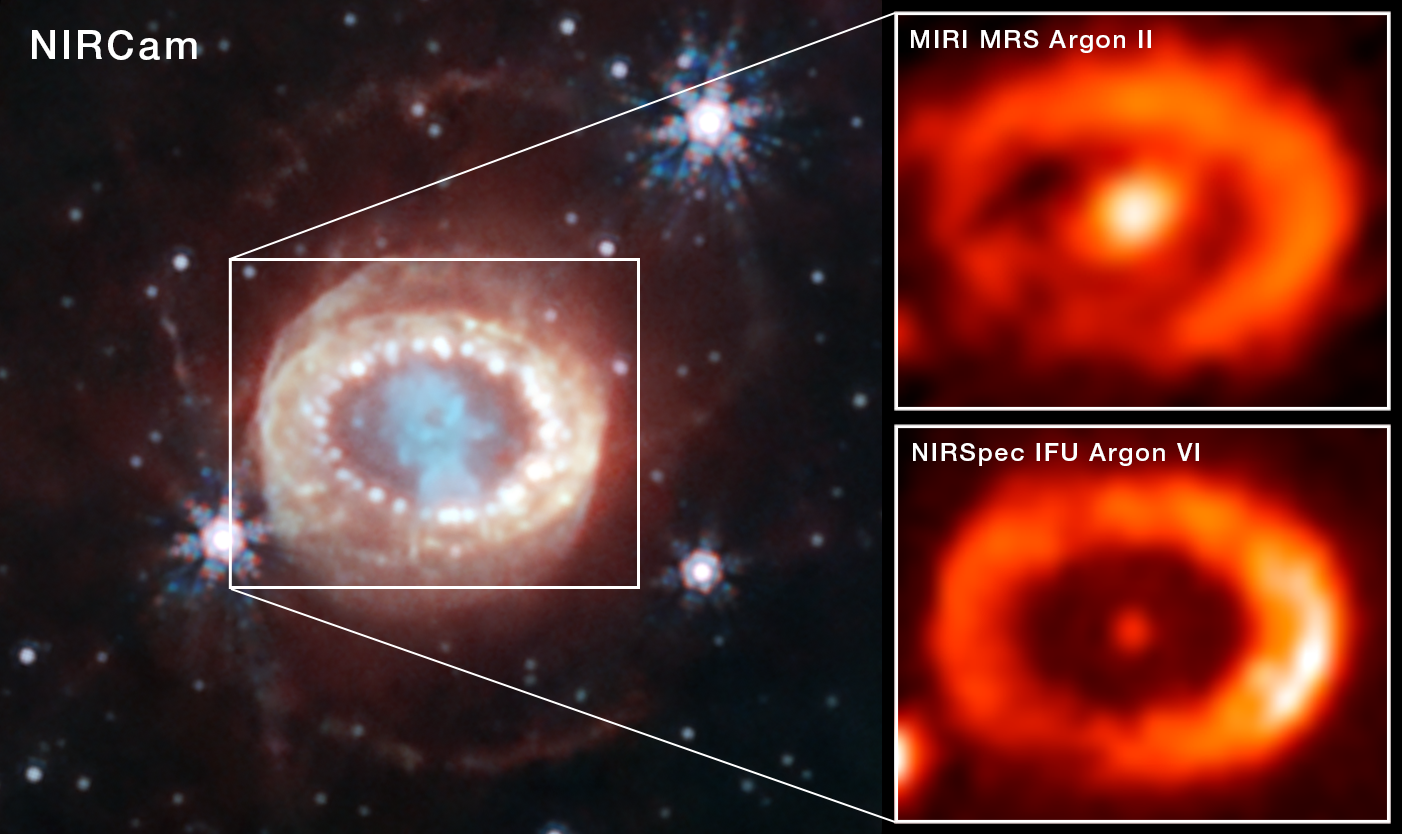

Argon emission in SN1987A

The NASA/ESA/CSA James Webb Space Telescope has observed the best evidence yet for emission from a neutron star at the site of a well-known and recently-observed supernova. The supernova, known as SN 1987A, occurred 160 000 light-years from Earth in the Large Magellanic Cloud.

LEFT: Webb’s 2023 NIRCam (Near-Infrared Camera) image of SN 1987A that highlights the object’s central structure, expanding with several thousands km/s. The blue region is the densest part of the clumpy ejecta, containing heavy elements like carbon, oxygen, magnesium and iron, as well as dust. The bright ‘ring of pearls’ is the result of the collision of the ejecta with a ring of gas ejected about 20 000 years before the explosion. Now spots are found even exterior to the ring, with diffuse emission surrounding it. These are the locations of supernova shocks hitting more exterior material from the progenitor star. The outer ejecta is now illuminated by X-rays from the collision, while the inner ejecta is powered mainly by radioactivity and a putative compact object.

RIGHT: An international team of astronomers has now used two of Webb’s instruments to study the emissions from the core of SN 1987A. The top image features the data from Webb’s MRS (Medium Resolution Spectrograph) mode of the MIRI instrument (Mid-InfraRed Instrument). The bottom image depicts data from Webb’s NIRSpec (Near Infrared Spectrograph) at shorter wavelengths. Spectral analysis of the MIRI results showed a strong signal due to ionised argon from the centre of the ejected material that surrounds the original site of SN 1987A. The NIRSpec data found even more heavily ionised chemical species, particularly five times ionised argon (meaning argon atoms that have lost five of their 18 electrons). Weak lines of ionised sulphur were also detected with MIRI. This indicated to the science team that there is a source of high-energy radiation in the centre of the SN 1987A remnant, illuminating an almost point-like region in the centre. The most likely source is believed to be a newly born neutron star.

Credit: NASA, ESA, CSA, STScI, and C. Fransson (Stockholm University), M. Matsuura (Cardiff University), M. J. Barlow (University College London), P. J. Kavanagh (Maynooth University), J. Larsson (KTH Royal Institute of Technology)